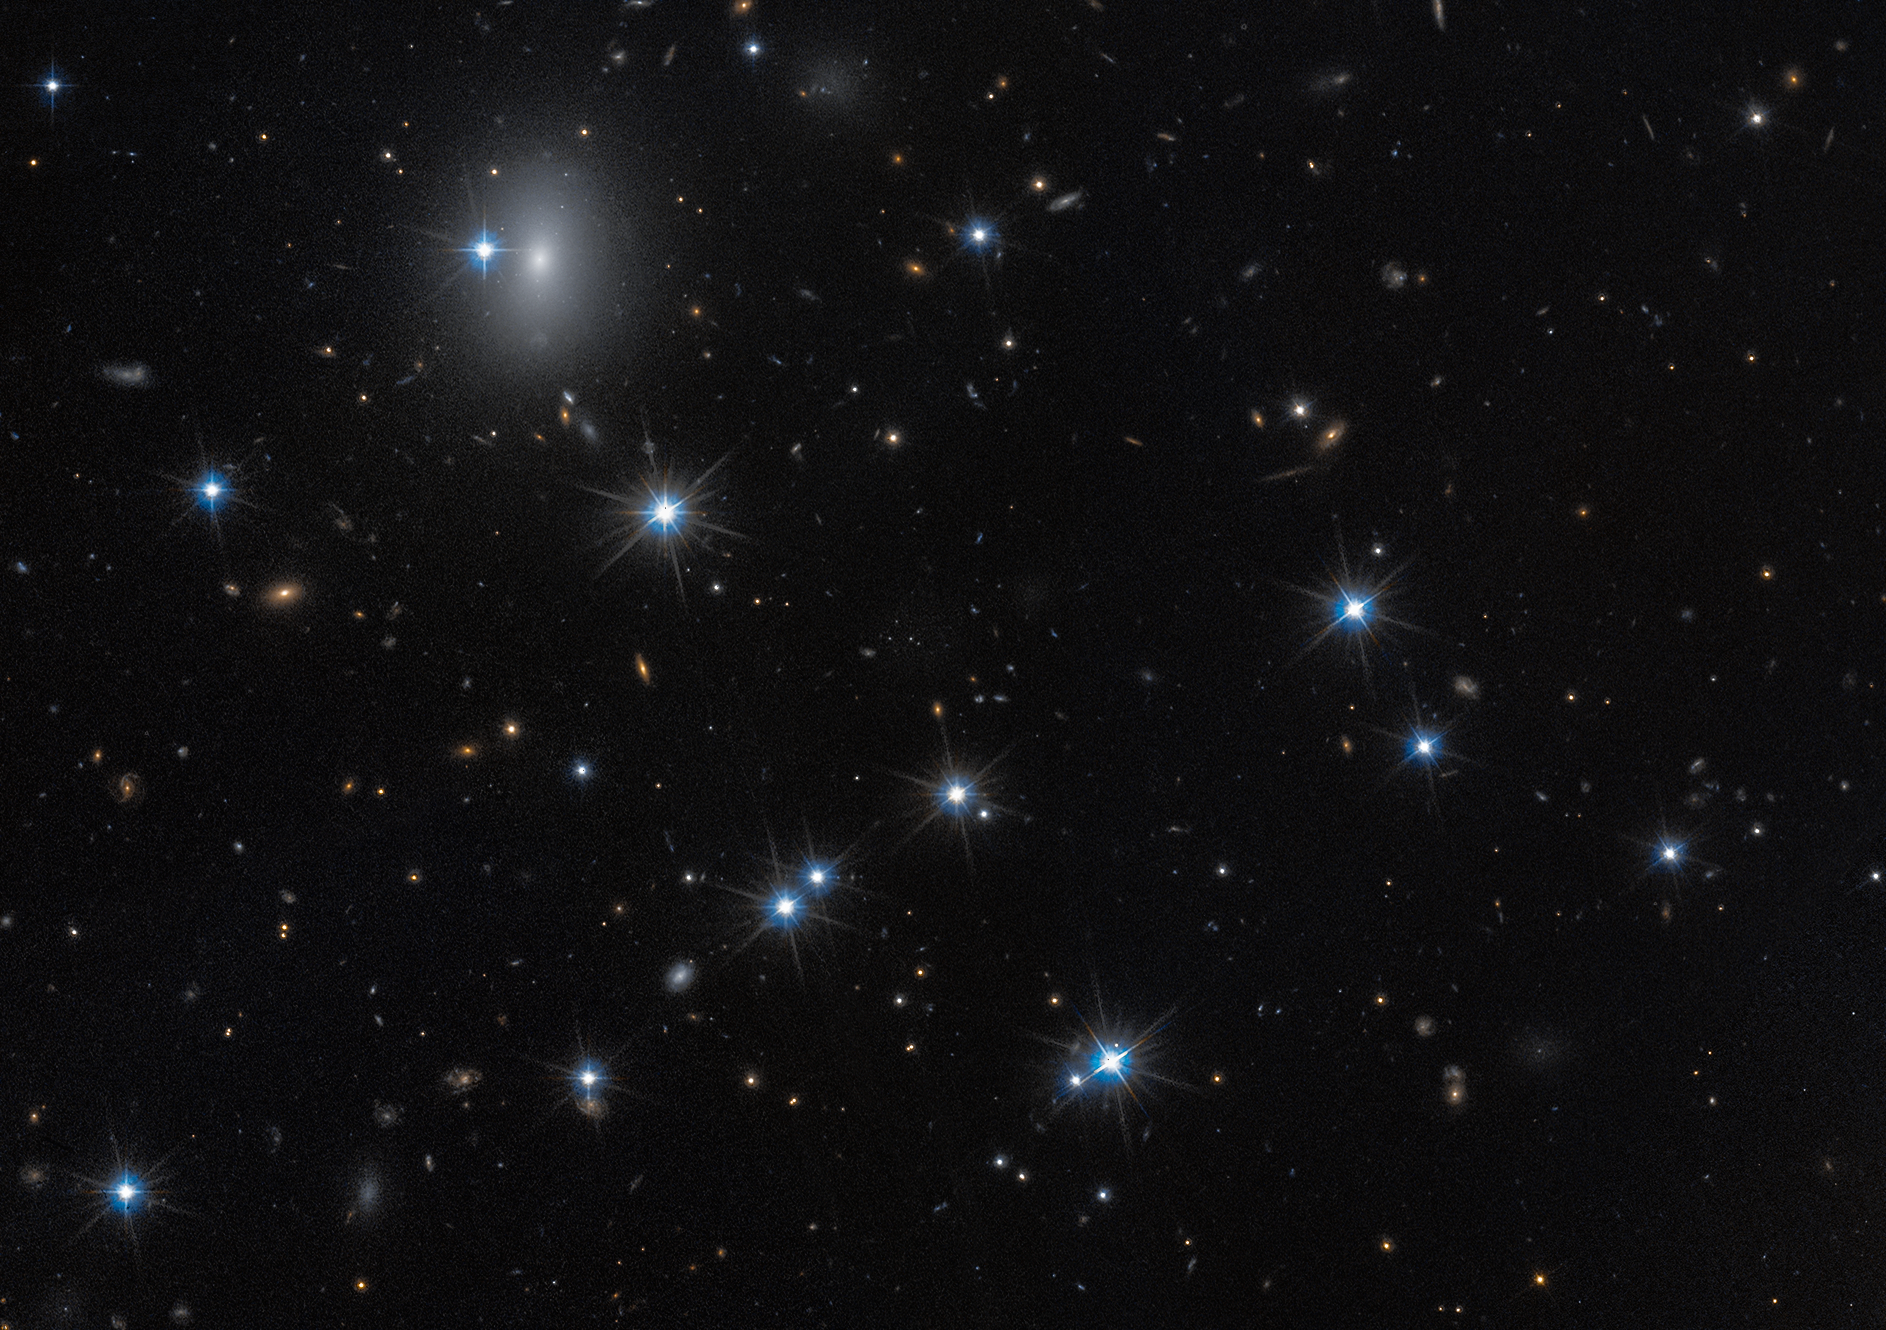

Galaxy field of low-surface-brightness galaxy CDG-2

The low-surface-brightness galaxy CDG-2, shown in this image from the NASA/ESA Hubble Space Telescope, is dominated by dark matter and contains only a sparse scattering of stars. This galaxy is nearly invisible, but by using advanced statistical techniques, scientists identified it by searching for tight groupings of stars called globular clusters at the centre of this image.

The Hubble observations include those from programme 15235 (W. Harris).

Credit: NASA, ESA, D. Li (Utoronto), Image Processing: J. DePasquale (STScI)